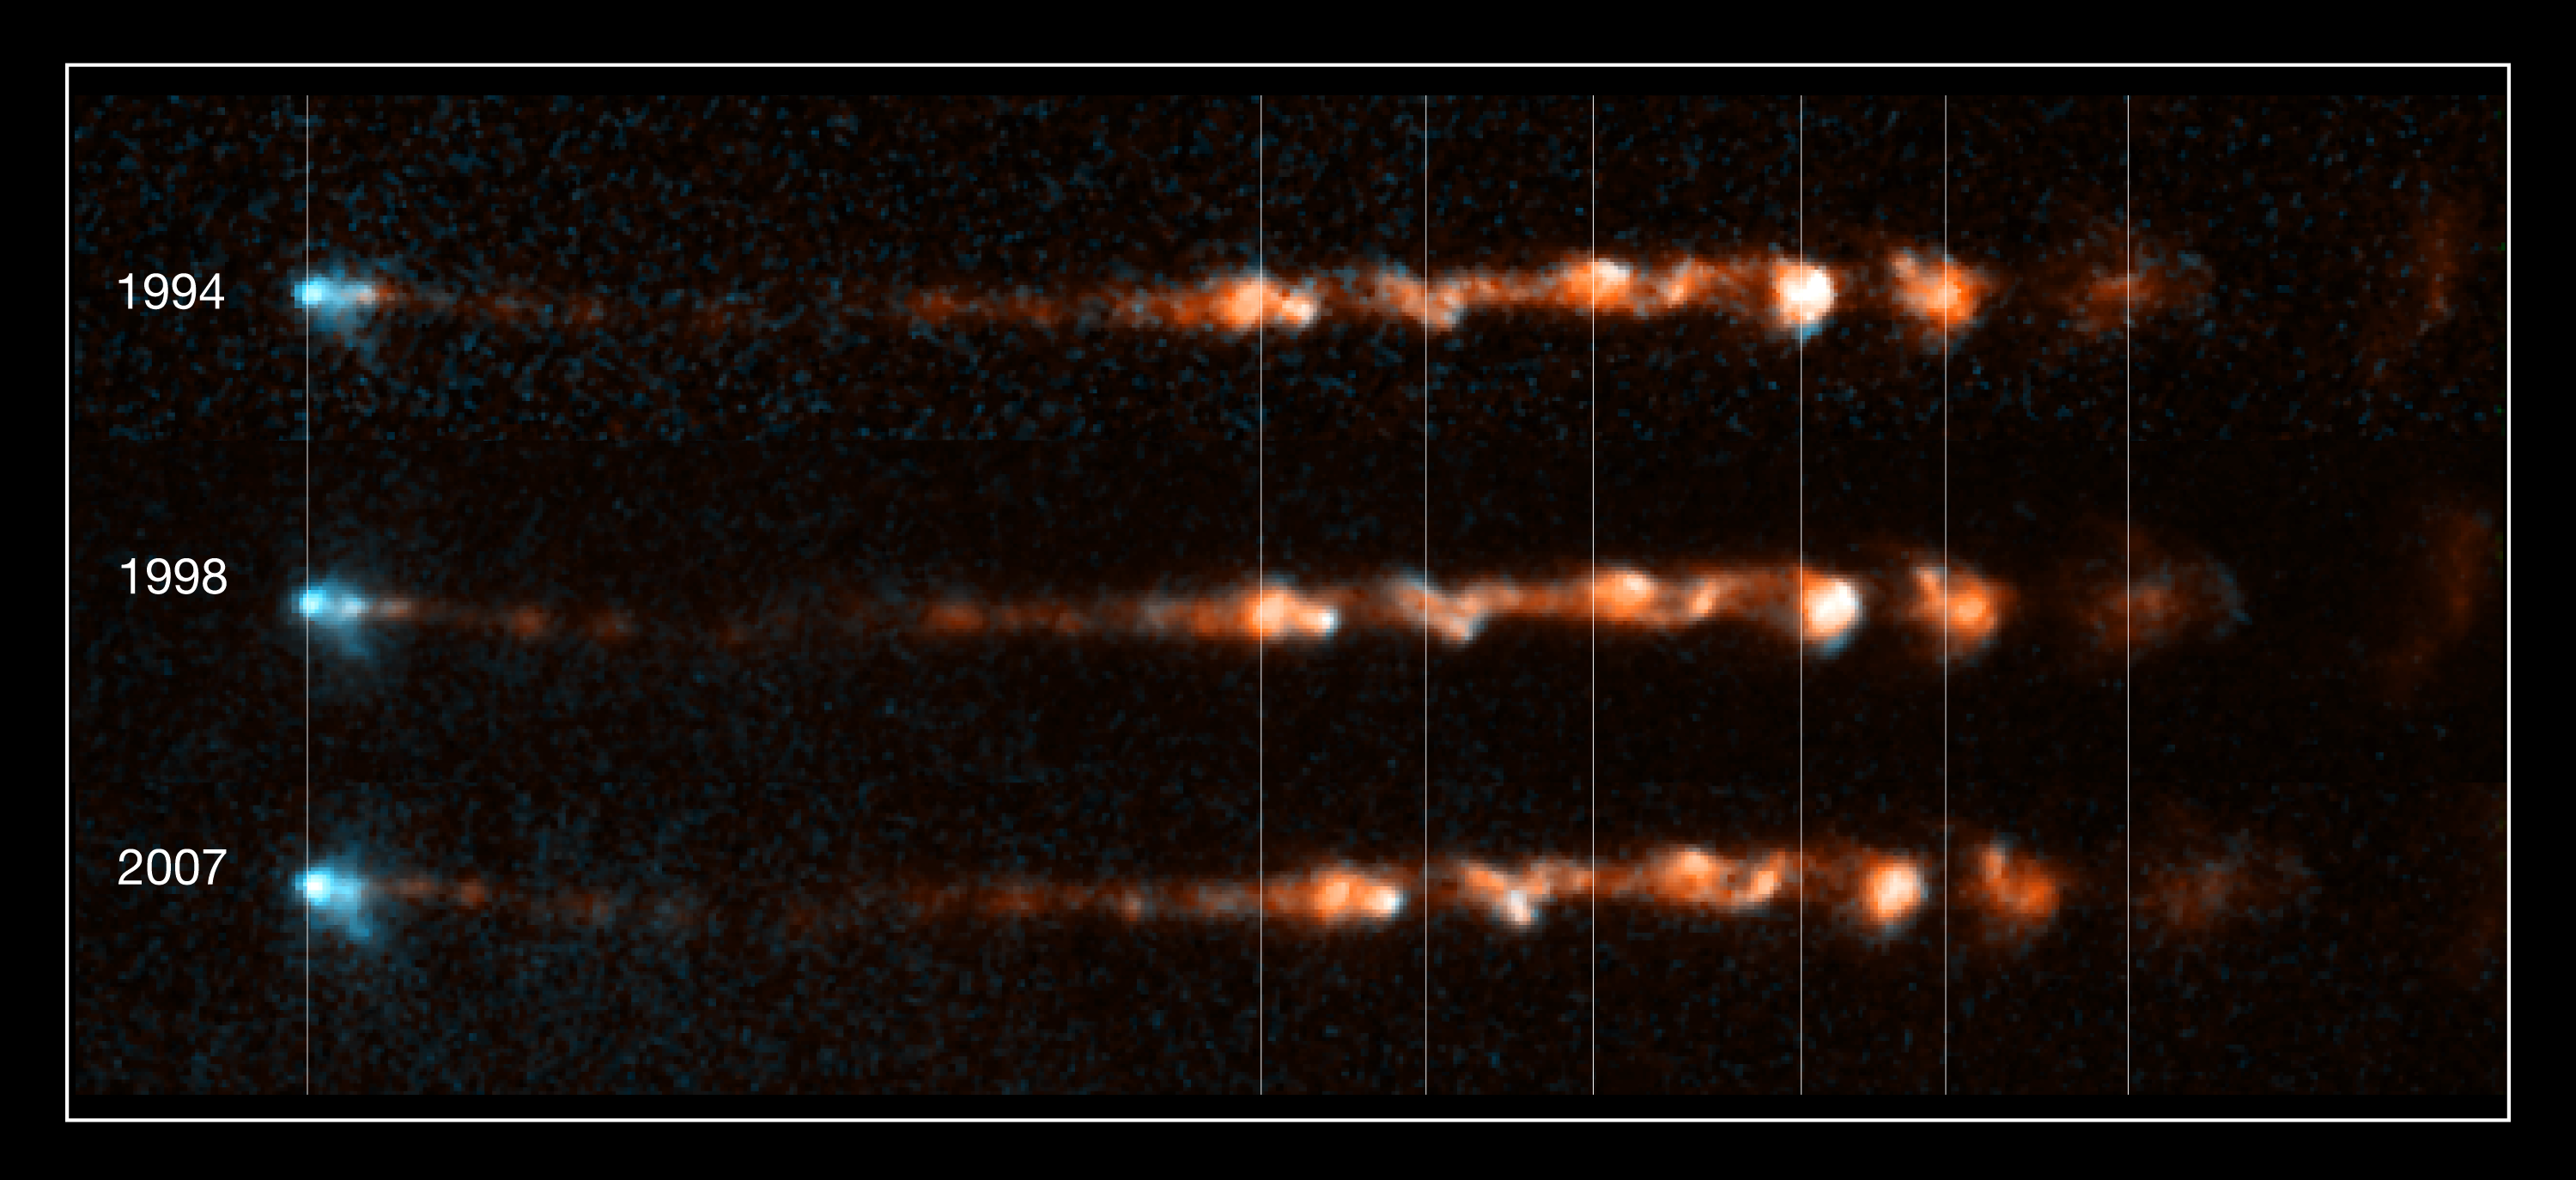

Close-up views of stellar jet HH 34

These images taken by the NASA/ESA Hubble Space Telescope show how a bright, clumpy jet, ejected from a young star, has changed over time. The jet, called Herbig-Haro 34 (or HH 34), is a signpost of star birth. Several bright regions in the clumps signify where material is slamming into other patches of material, heating up, and glowing. The images show that a couple of bright areas on the right faded over time, as heated material cooled. Two regions at left, however, brightened over the 14-year span of observations, pinpointing fresh collision sites. Ejected episodically by a young star like cannon salvos, the blobby material in HH 34 zips along at more than 700 000 kilometres per hour. The speedy jet is confined to narrow beams by the powerful stellar magnetic field.

These images are part of a series of time-lapse movies astronomers have made showing the motion of several Herbig-Haro jets over time. The movies were stitched together from images taken over a 14-year period by Hubble’s Wide Field Planetary Camera 2. Hubble followed the HH 34 jets over three epochs, 1994, 1998, and 2007.

HH 34 is roughly 1350 light-years from Earth, near the Orion Nebula.

Credit: NASA, ESA, and P. Hartigan (Rice University)